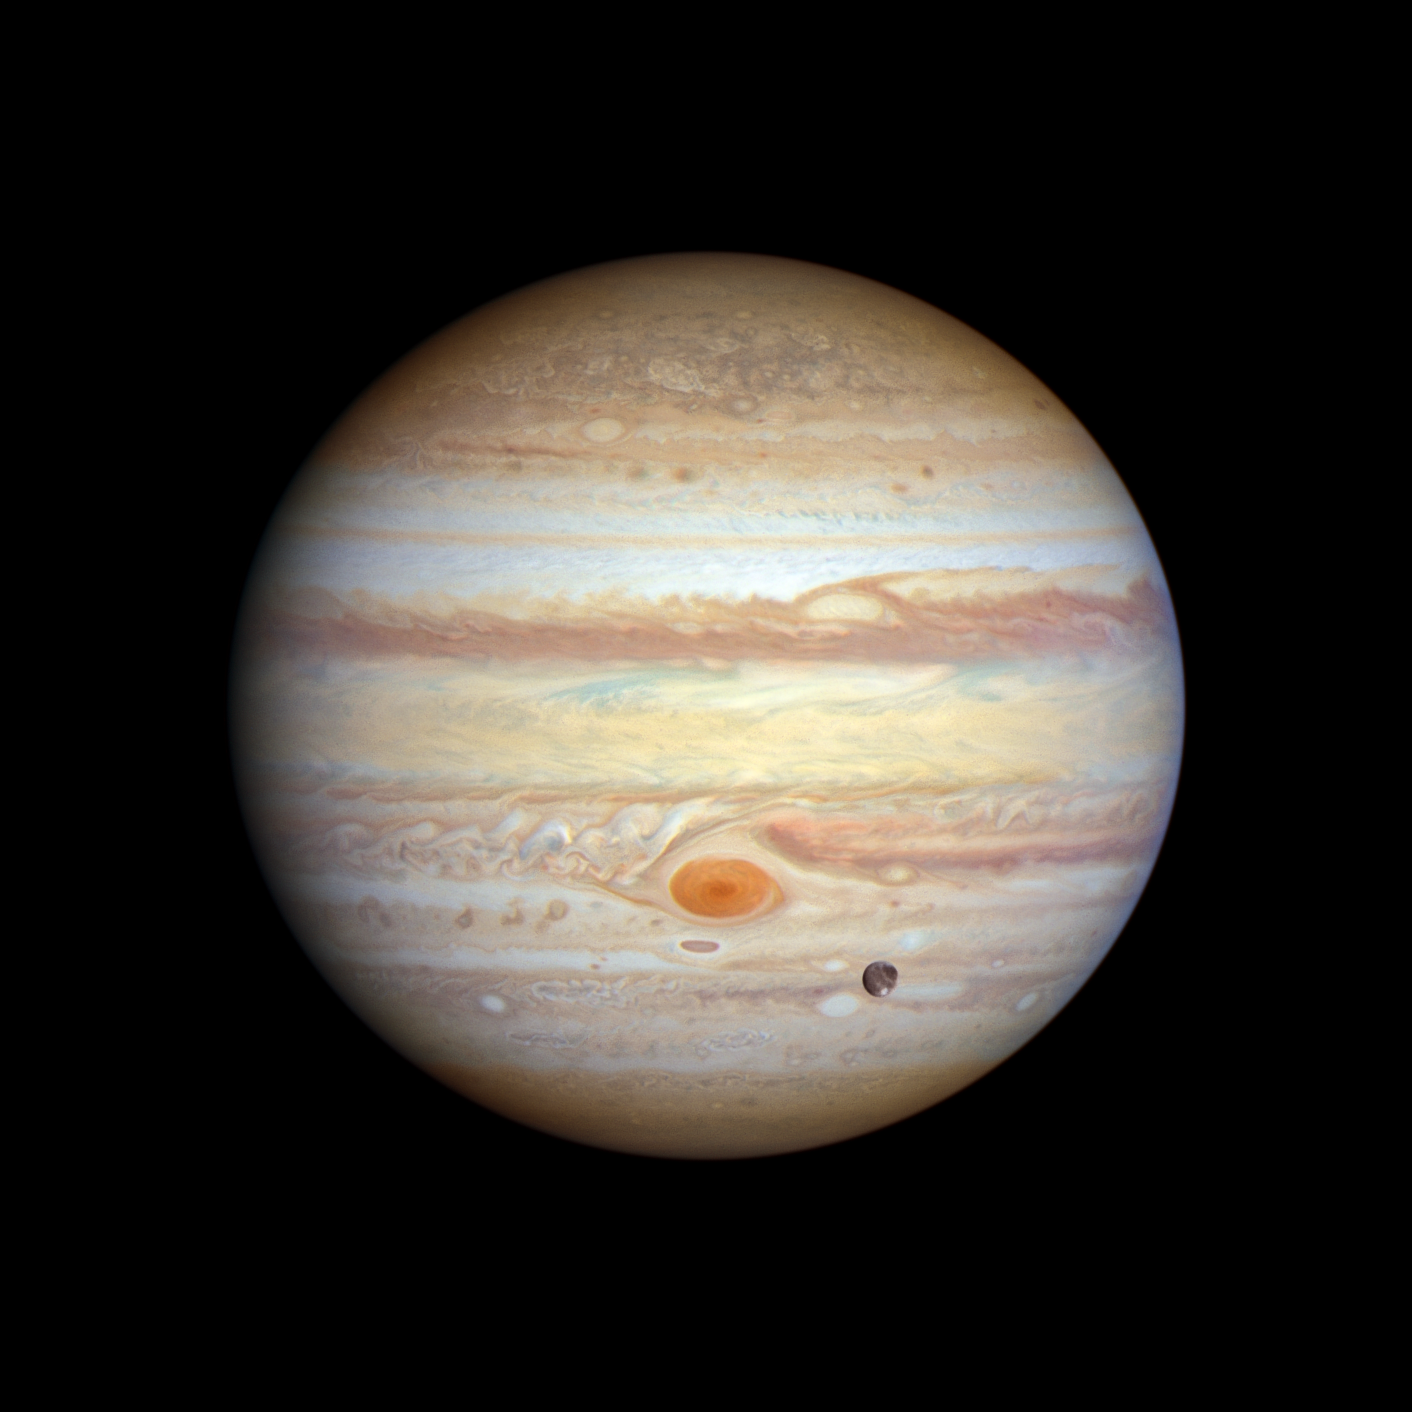

Jupiter (January 2023)

Jupiter’s legendary Great Red Spot takes centre stage in this view. Though this vortex is big enough to swallow Earth, it has actually shrunk to the smallest size it has ever been according to observation records dating back 150 years. Jupiter’s icy moon Ganymede can be seen transiting the giant planet at lower right. Slightly larger than the planet Mercury, Ganymede is the largest moon in the Solar System. It is a cratered world and has a mainly water-ice surface with apparent glacial flows driven by internal heat. This image was taken on 6 January 2023.

Credit: NASA, ESA, STScI, A. Simon (NASA-GSFC), M. H. Wong (UC Berkeley), J. DePasquale (STScI)